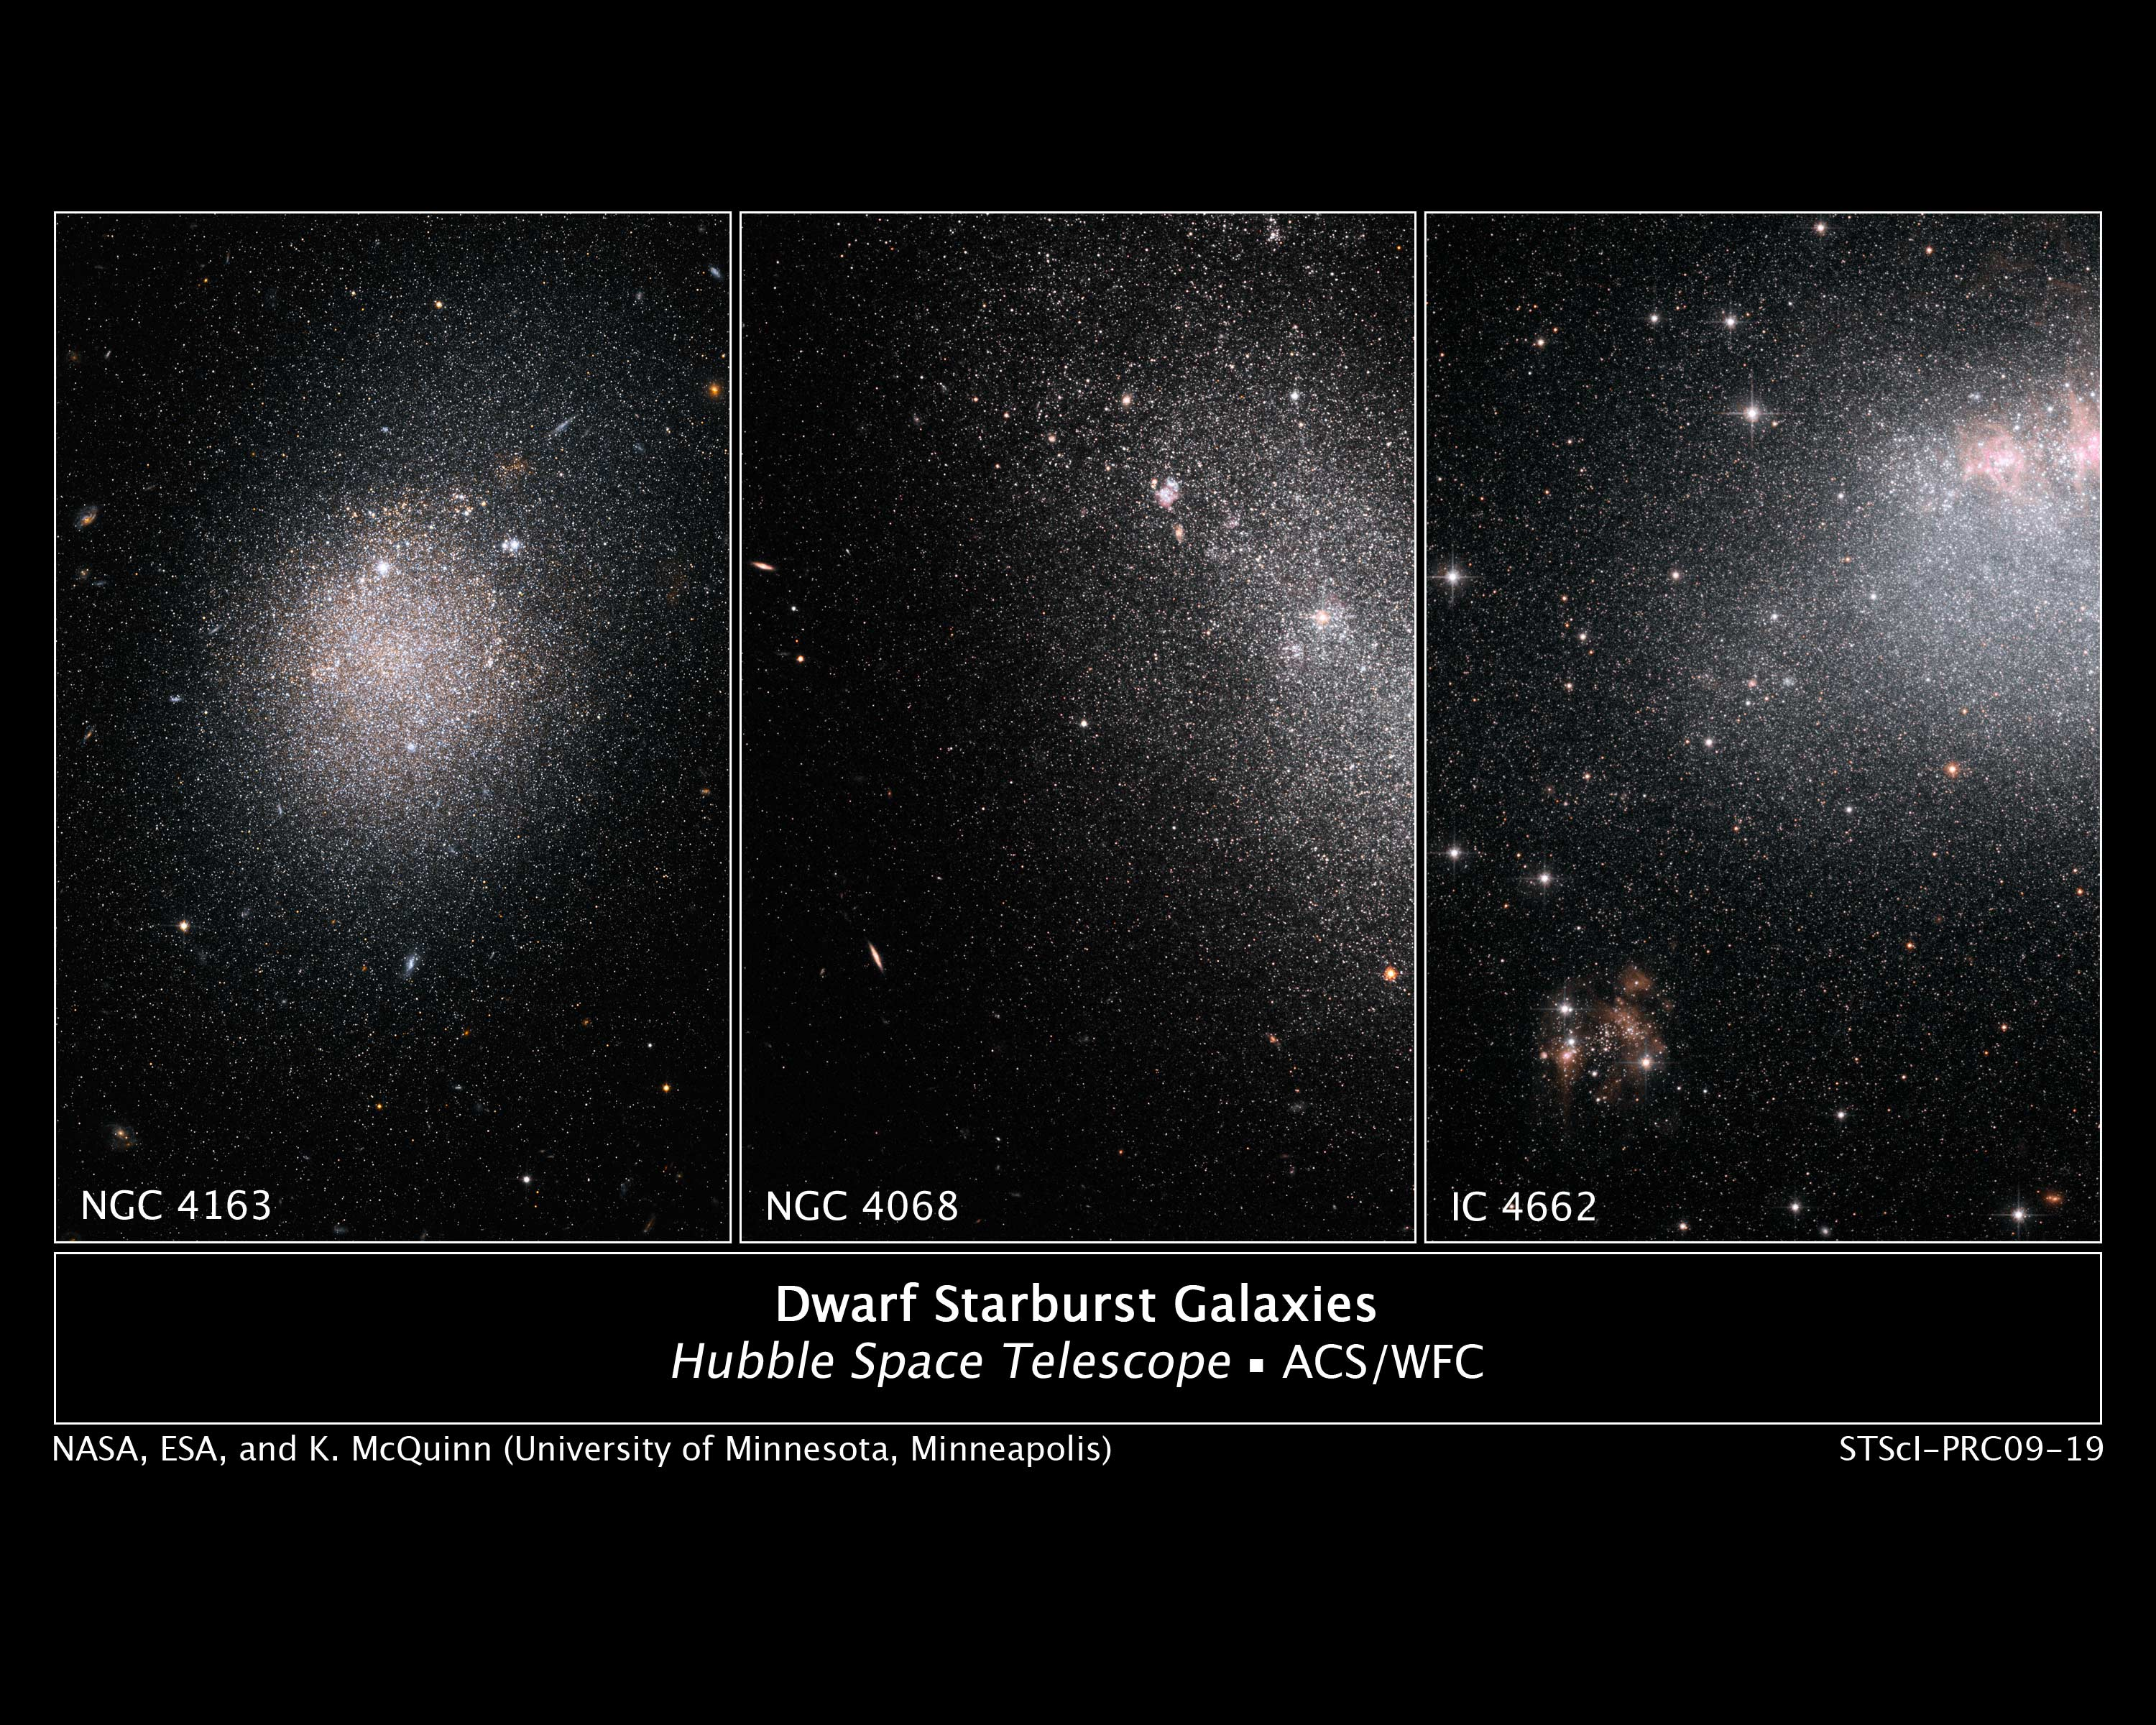

Hubble spies a frenzy of star birth in dwarf galaxies (montage)

These images, taken by the NASA/ESA Hubble Space Telescope, show myriad stars residing in the central regions of the three dwarf galaxies NGC 4163, NGC 4068, and IC 4662.

The bluish dots are younger stars; the reddish dots, older stars. The irregularly shaped red blobs in the images of NGC 4163 and IC 4662 are regions of current starburst activity. Starbursts are areas of intense star formation.

The three galaxies are part of a Hubble study of starbursts in nearby, small, or dwarf, galaxies. Based on this study, astronomers have found that starbursts continue 100 times longer than first thought, lasting 200 million to 400 million years. These galaxies show that starbursts are not isolated events, but sweep across a galaxy.

Each of the three starburst galaxies has a different shape. The collection of stars in NGC 4163 is more spherical, with a higher concentration of stars forming in the center. By contrast, the grouping of stars in NGC 4068 is more elongated and has fewer new stars than the other two galaxies. Astronomers think the starburst in this galaxy is ending. In the image of IC 4662 the clumpy red blobs peppered throughout the galaxy indicate active regions of star birth. One such region extends off the image's top, right edge. This galaxy exhibits the strongest star formation of the three galaxies in the study.

The distances of the galaxies range from 8 million to 14 million light-years away.

The images were taken in 2004 by the Advanced Camera for Surveys.

Credit: NASA, ESA, K. McQuinn (University of Minnesota, Minneapolis) and I. Karachentsev (Special Astrophysical Observatory of the Russian Academy of Sciences, Russia)